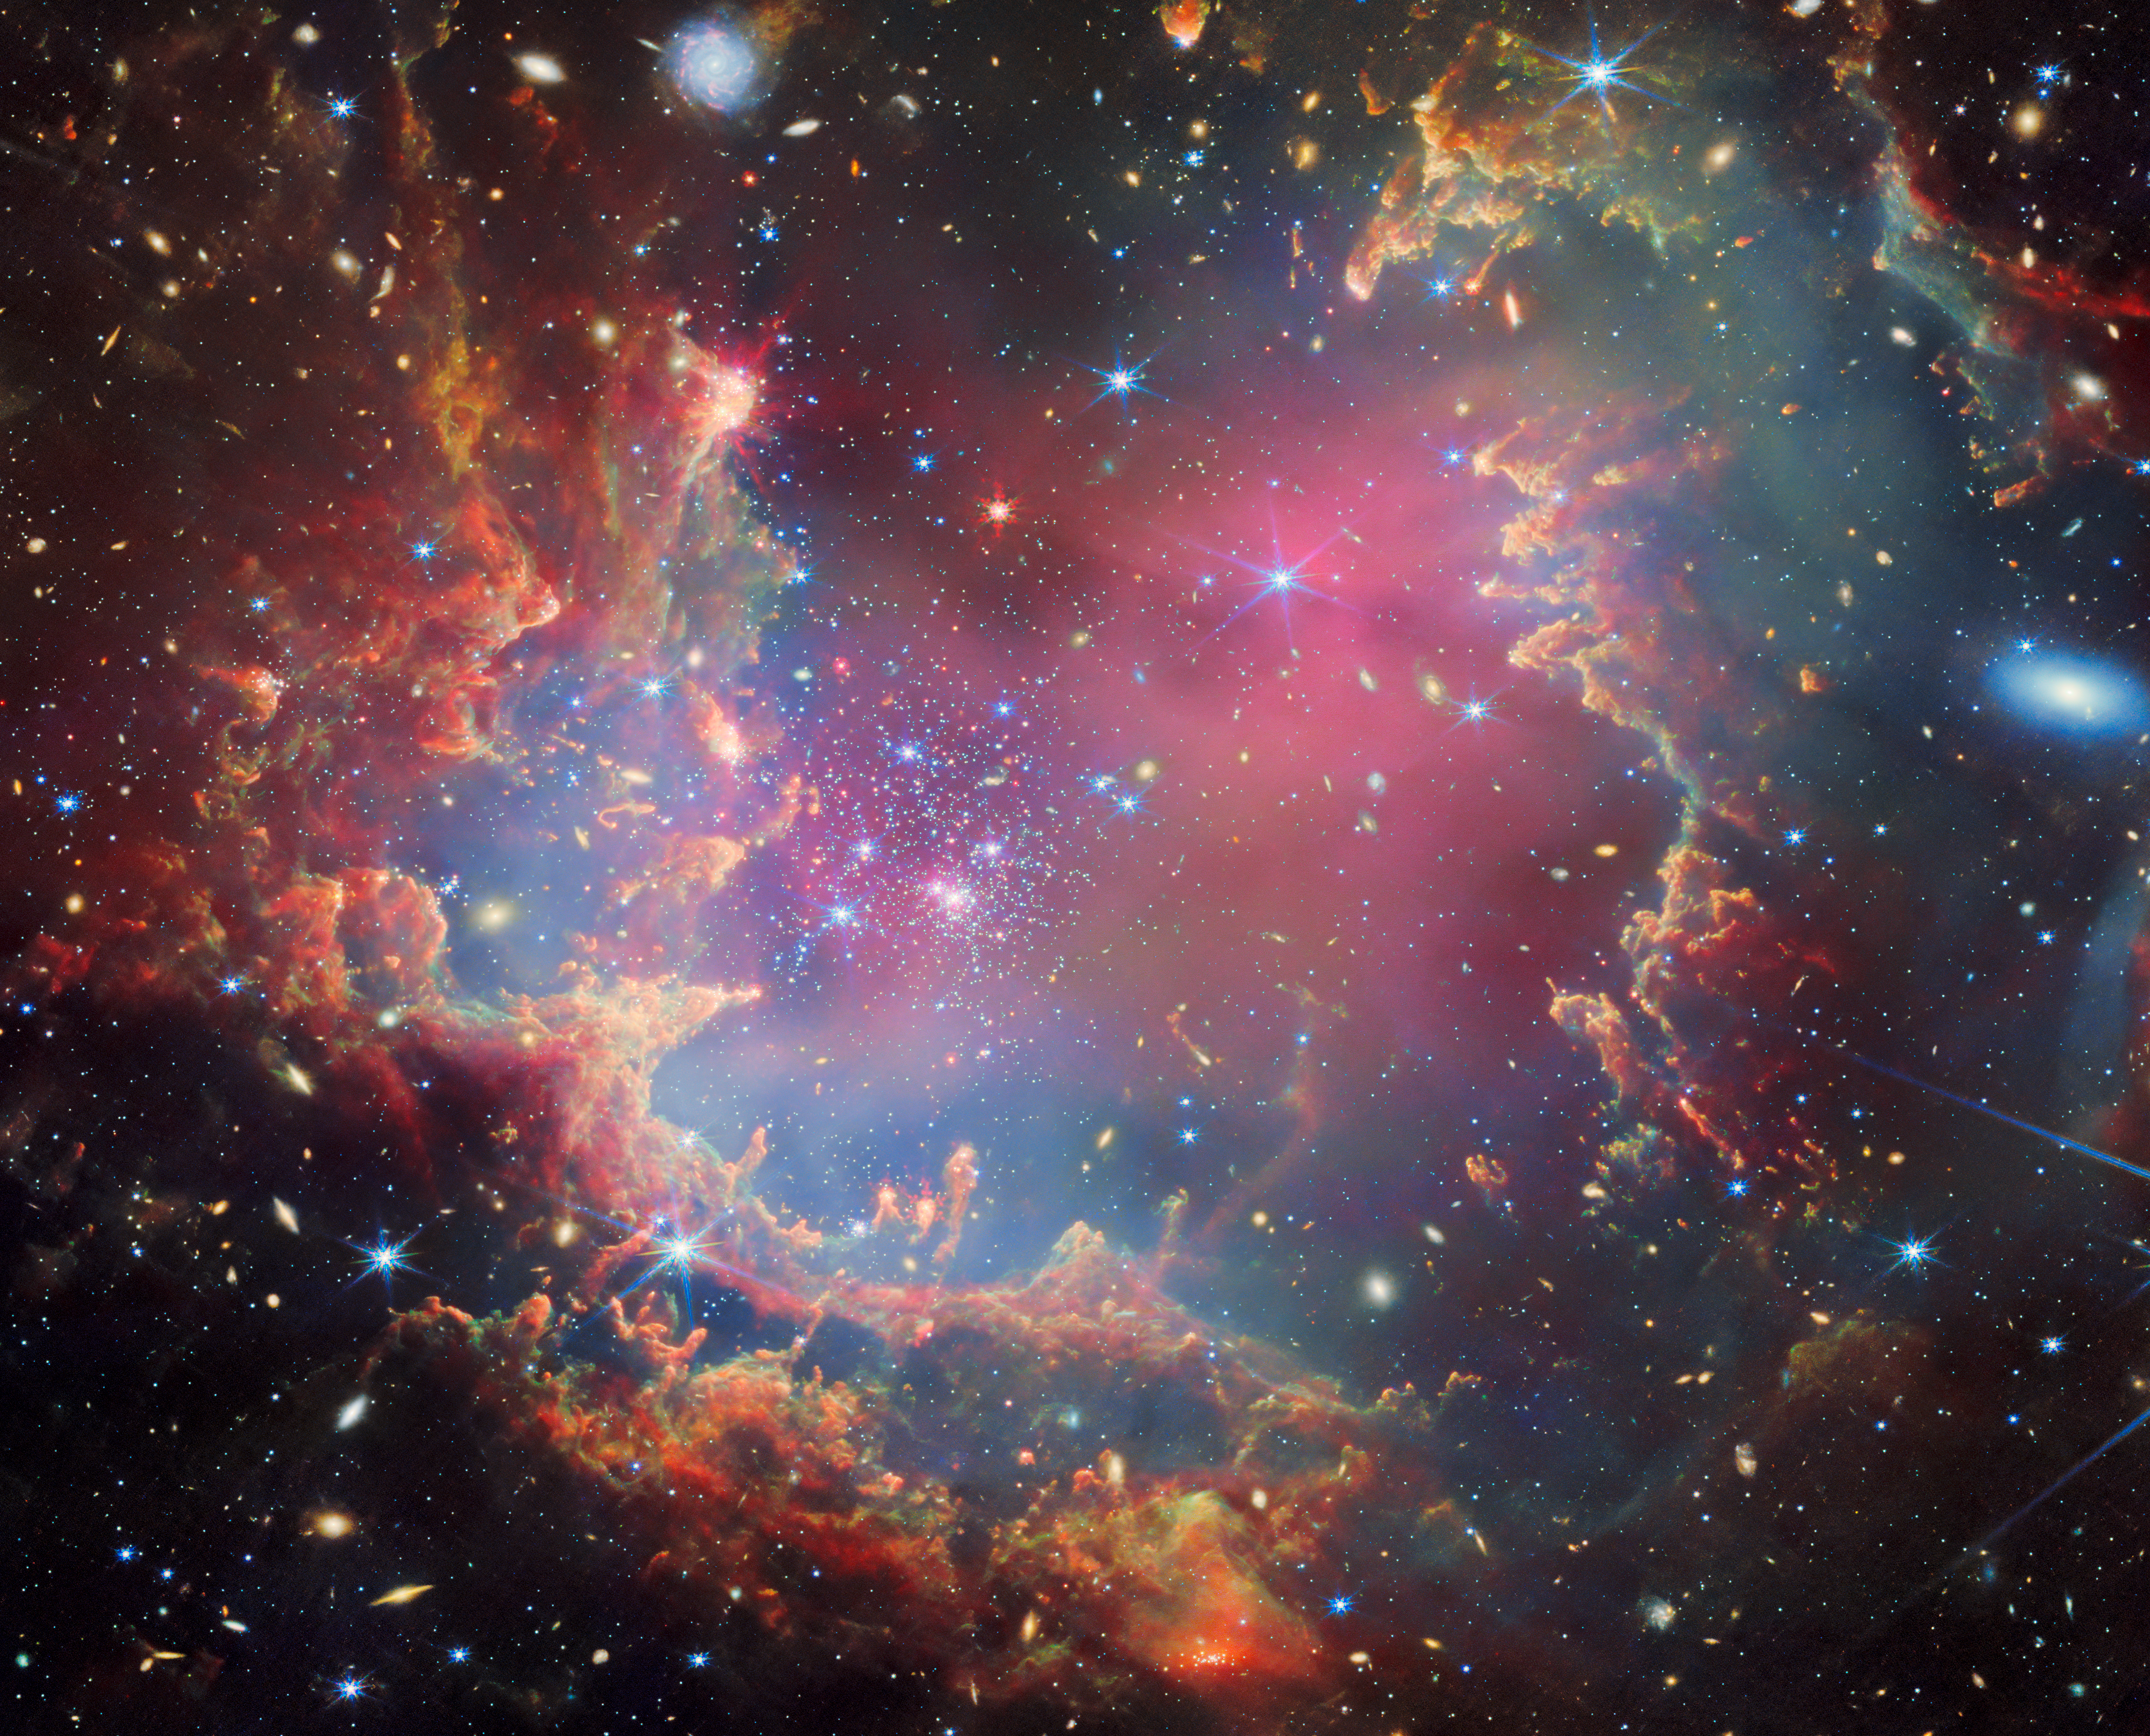

NGC 602 (Webb image)

Near the outskirts of the Small Magellanic Cloud, a satellite galaxy roughly 200 000 light-years from Earth, lies the young star cluster NGC 602, which is featured in this new image from the NASA/ESA/CSA James Webb Space Telescope. This image includes data from Webb’s NIRCam (Near-InfraRed Camera) and MIRI (Mid-InfraRed Instrument).

The local environment of this cluster is a close analogue of what existed in the early Universe, with very low abundances of elements heavier than hydrogen and helium. The existence of dark clouds of dense dust and the fact that the cluster is rich in ionised gas also suggest the presence of ongoing star formation processes. This cluster provides a valuable opportunity to examine star formation scenarios under dramatically different conditions from those in the solar neighbourhood.

Credit: ESA/Webb, NASA & CSA, P. Zeidler, E. Sabbi, A. Nota, M. Zamani (ESA/Webb)